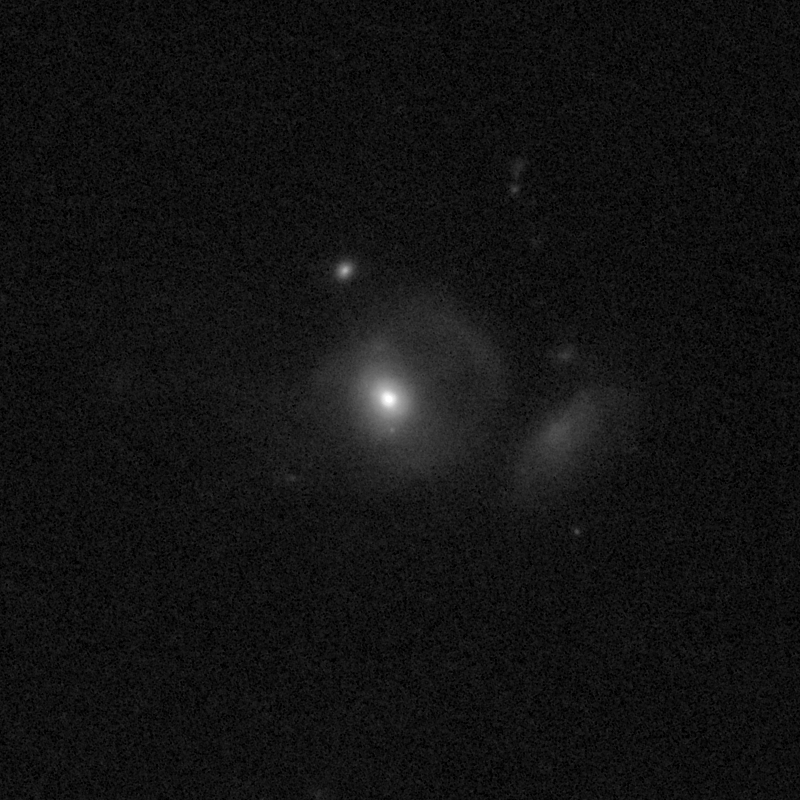

Outflows from merging galaxy J1634+4619

This NASA/ESA Hubble Space Telescope image of the galaxy J1634+4619 shows it is undergoing a firestorm of star birth, as shown by its bright white cores.

This star-making frenzy was ignited by mergers with other galaxies. The odd shape of the galaxy is telltale evidence of a close encounters.

The new Hubble Wide Field Camera 3 observations of this and eleven other galaxies undergoing the same process suggest that energy from the star-birthing frenzies created powerful winds that are blowing out the gas, meaning it is not available to form future generations of stars.

This activity occurred when the Universe was half its current age of 13.7 billion years. The gas-poor galaxies may eventually become so-called red and dead galaxies, composed only of aging stars.

This Hubble false-colour image was processed to bring out important details in the galaxy. The image were taken in 2010.

Credit: NASA, ESA, and P. Sell (Texas Tech University)